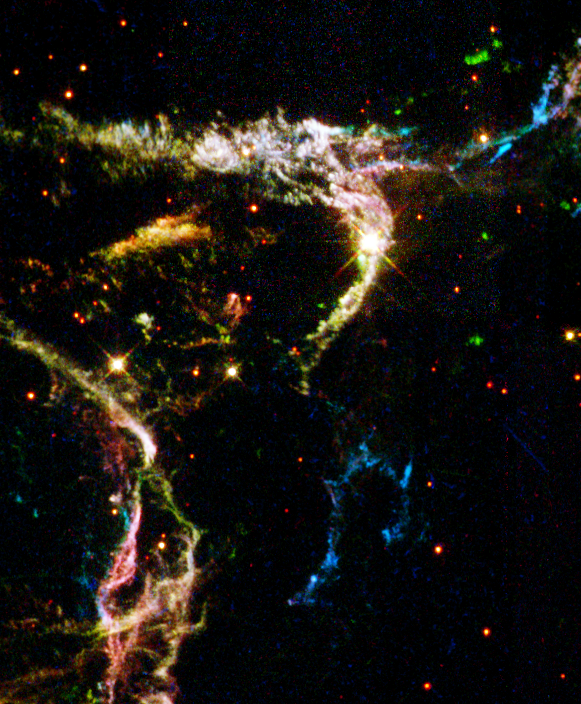

Details of Supernova Remnant Cassiopeia A

This is a section of Cassiopeia A, the youngest known supernova remnant in our Milky Way Galaxy. These streamer like remains of an exploding star are 10,000 light-years away in the constellation Cassiopeia and were first observed from Earth 320 years ago.

Credit: NASA/ESA and the Hubble Heritage Team (STScI/AURA)